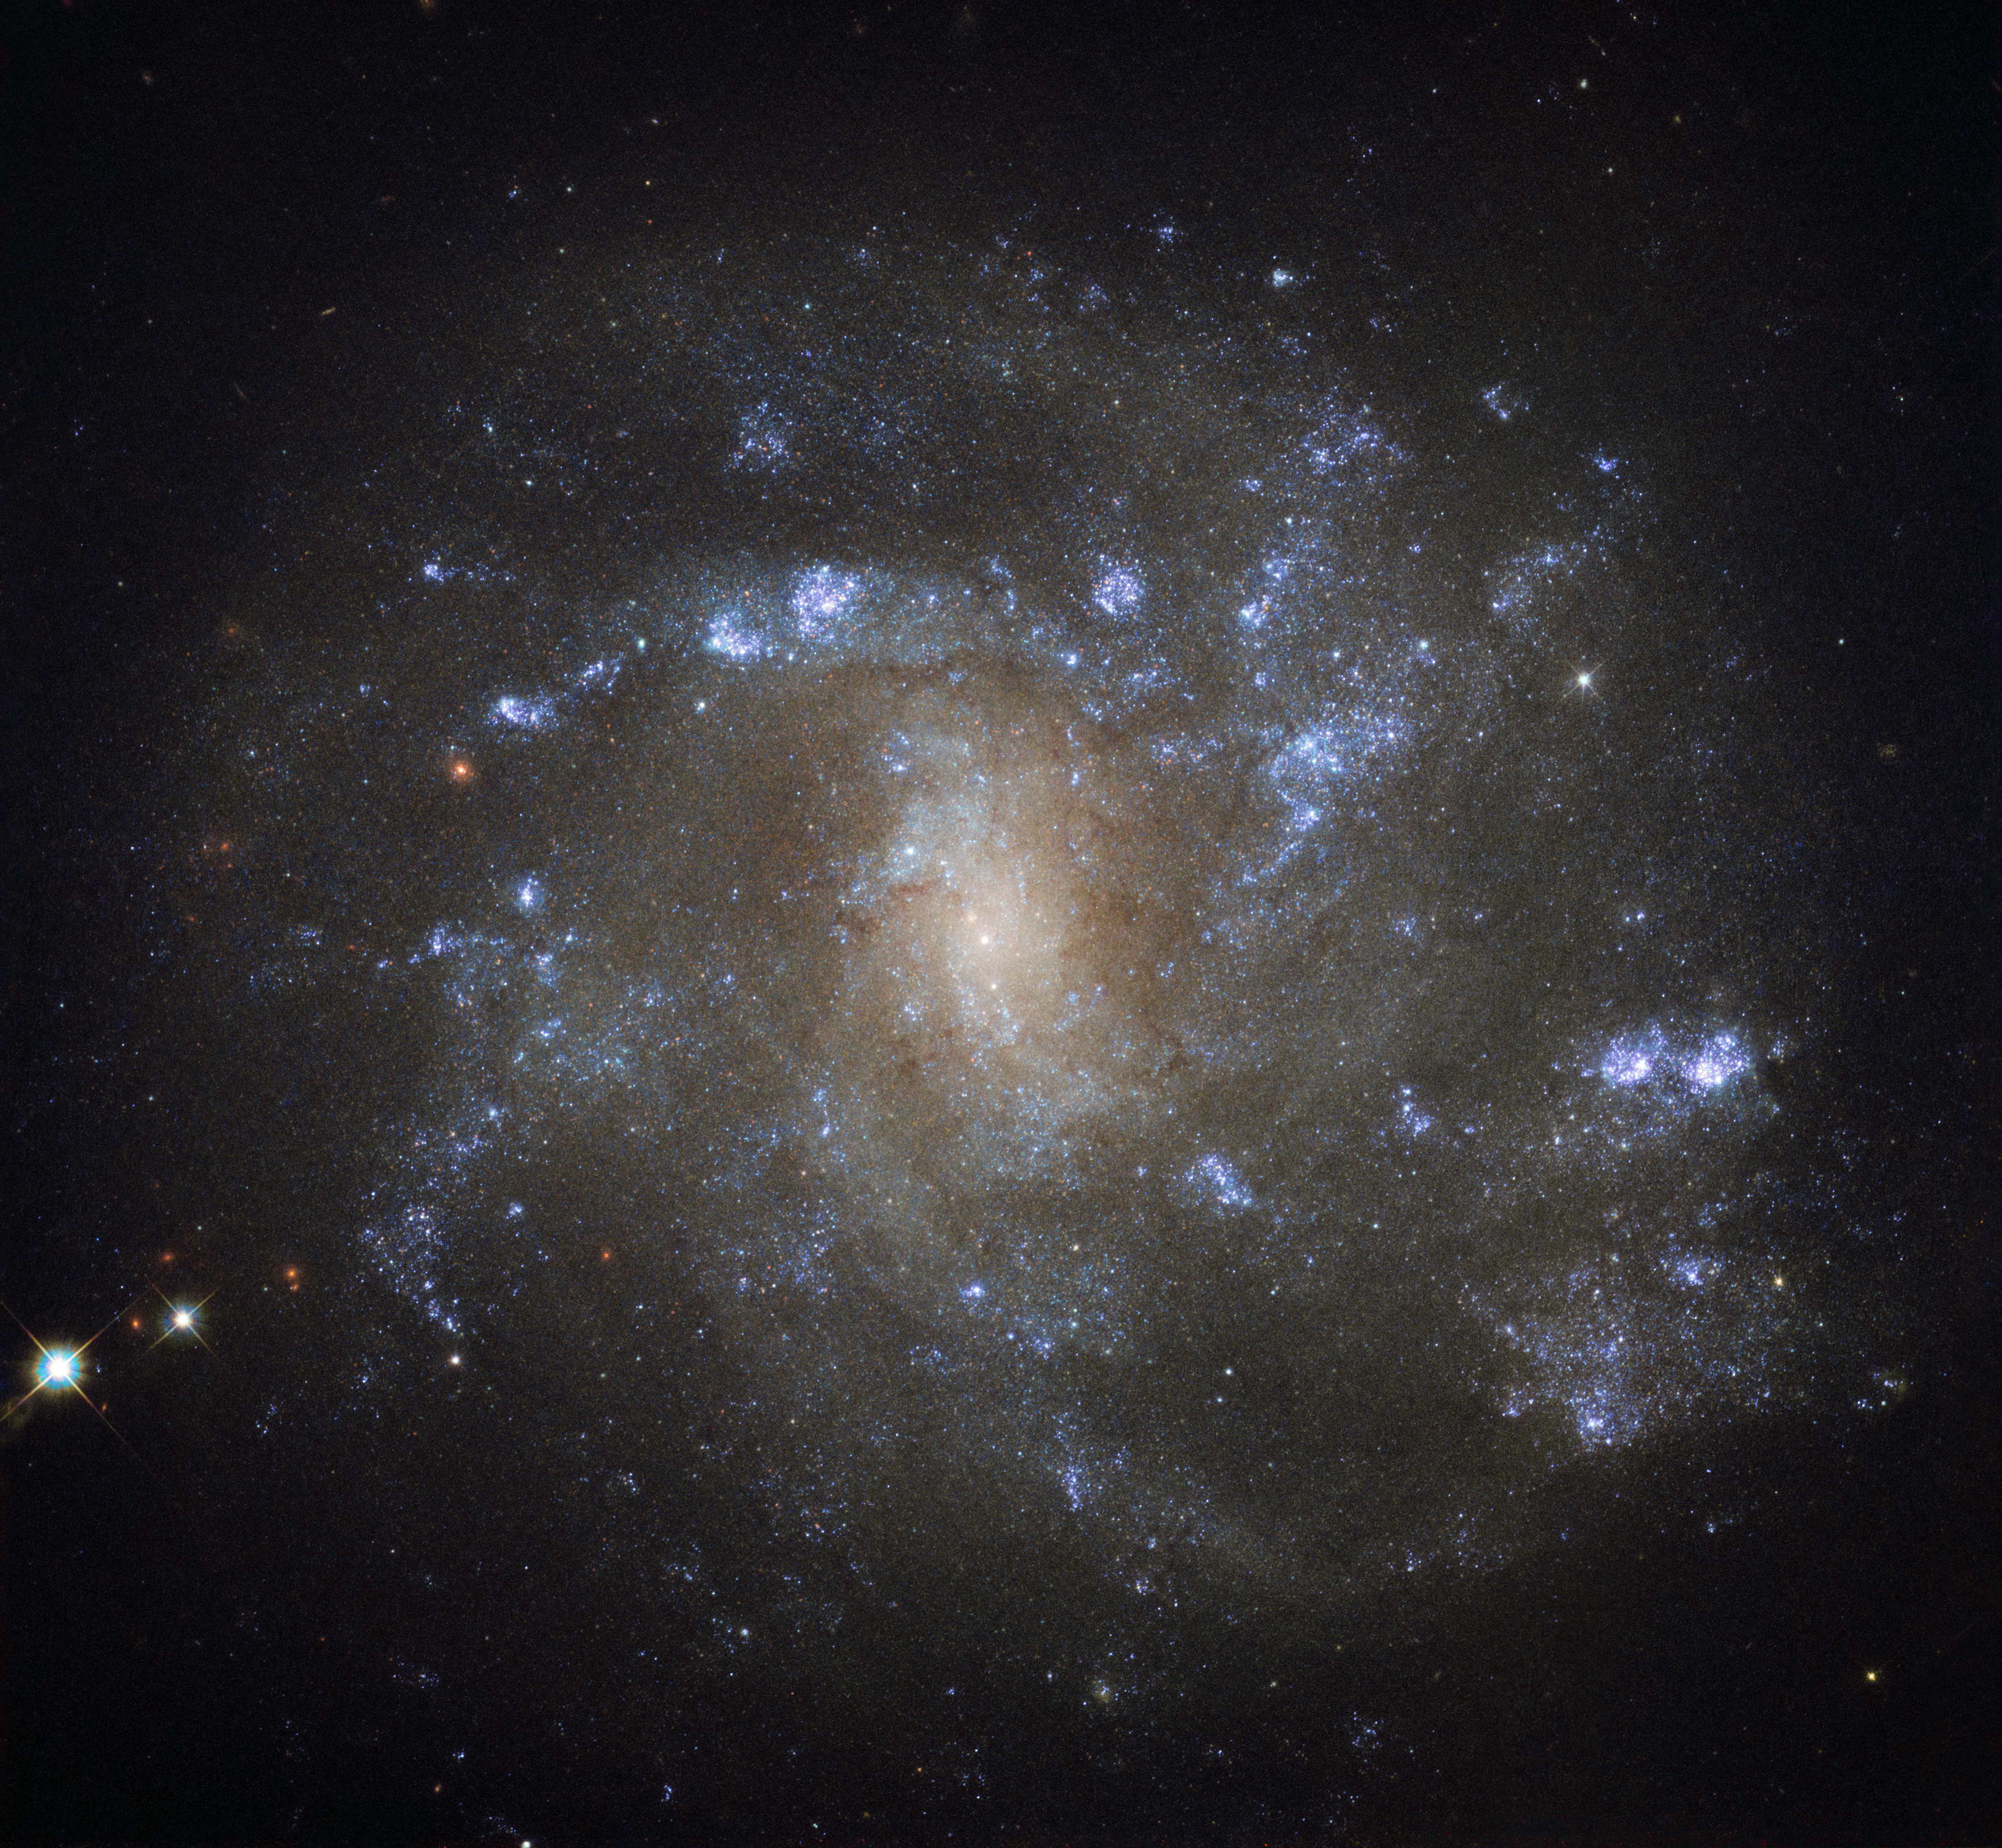

Just like home

Discovered by British astronomer William Herschel over 200 years ago, NGC 2500 lies about 30 million light-years away in the northern constellation of Lynx. As this NASA/ESA Hubble Space Telescope image shows, NGC 2500 is a particular kind of spiral galaxy known as a barred spiral, its wispy arms swirling out from a bright, elongated core.

Barred spirals are actually more common than was once thought. Around two-thirds of all spiral galaxies — including the Milky Way — exhibit these straight bars cutting through their centres. These cosmic structures act as glowing nurseries for newborn stars, and funnel material towards the active core of a galaxy. NGC 2500 is still actively forming new stars, although this process appears to be occurring very unevenly. The upper half of the galaxy — where the spiral arms are slightly better defined — hosts many more star-forming regions than the lower half, as indicated by the bright, dotted islands of light.

There is another similarity between NGC 2500 and our home galaxy. Together with Andromeda, Triangulum, and many smaller natural satellites, the Milky Way is part of the Local Group of galaxies, a gathering of over 50 galaxies all loosely held together by gravity. NGC 2500 forms a similar group with some of its nearby neighbours, including NGC 2541, NGC 2552, NGC 2537, and the bright, Andromeda-like spiral NGC 2481 (known collectively as the NGC 2841 group).

Credit: ESA/Hubble & NASA